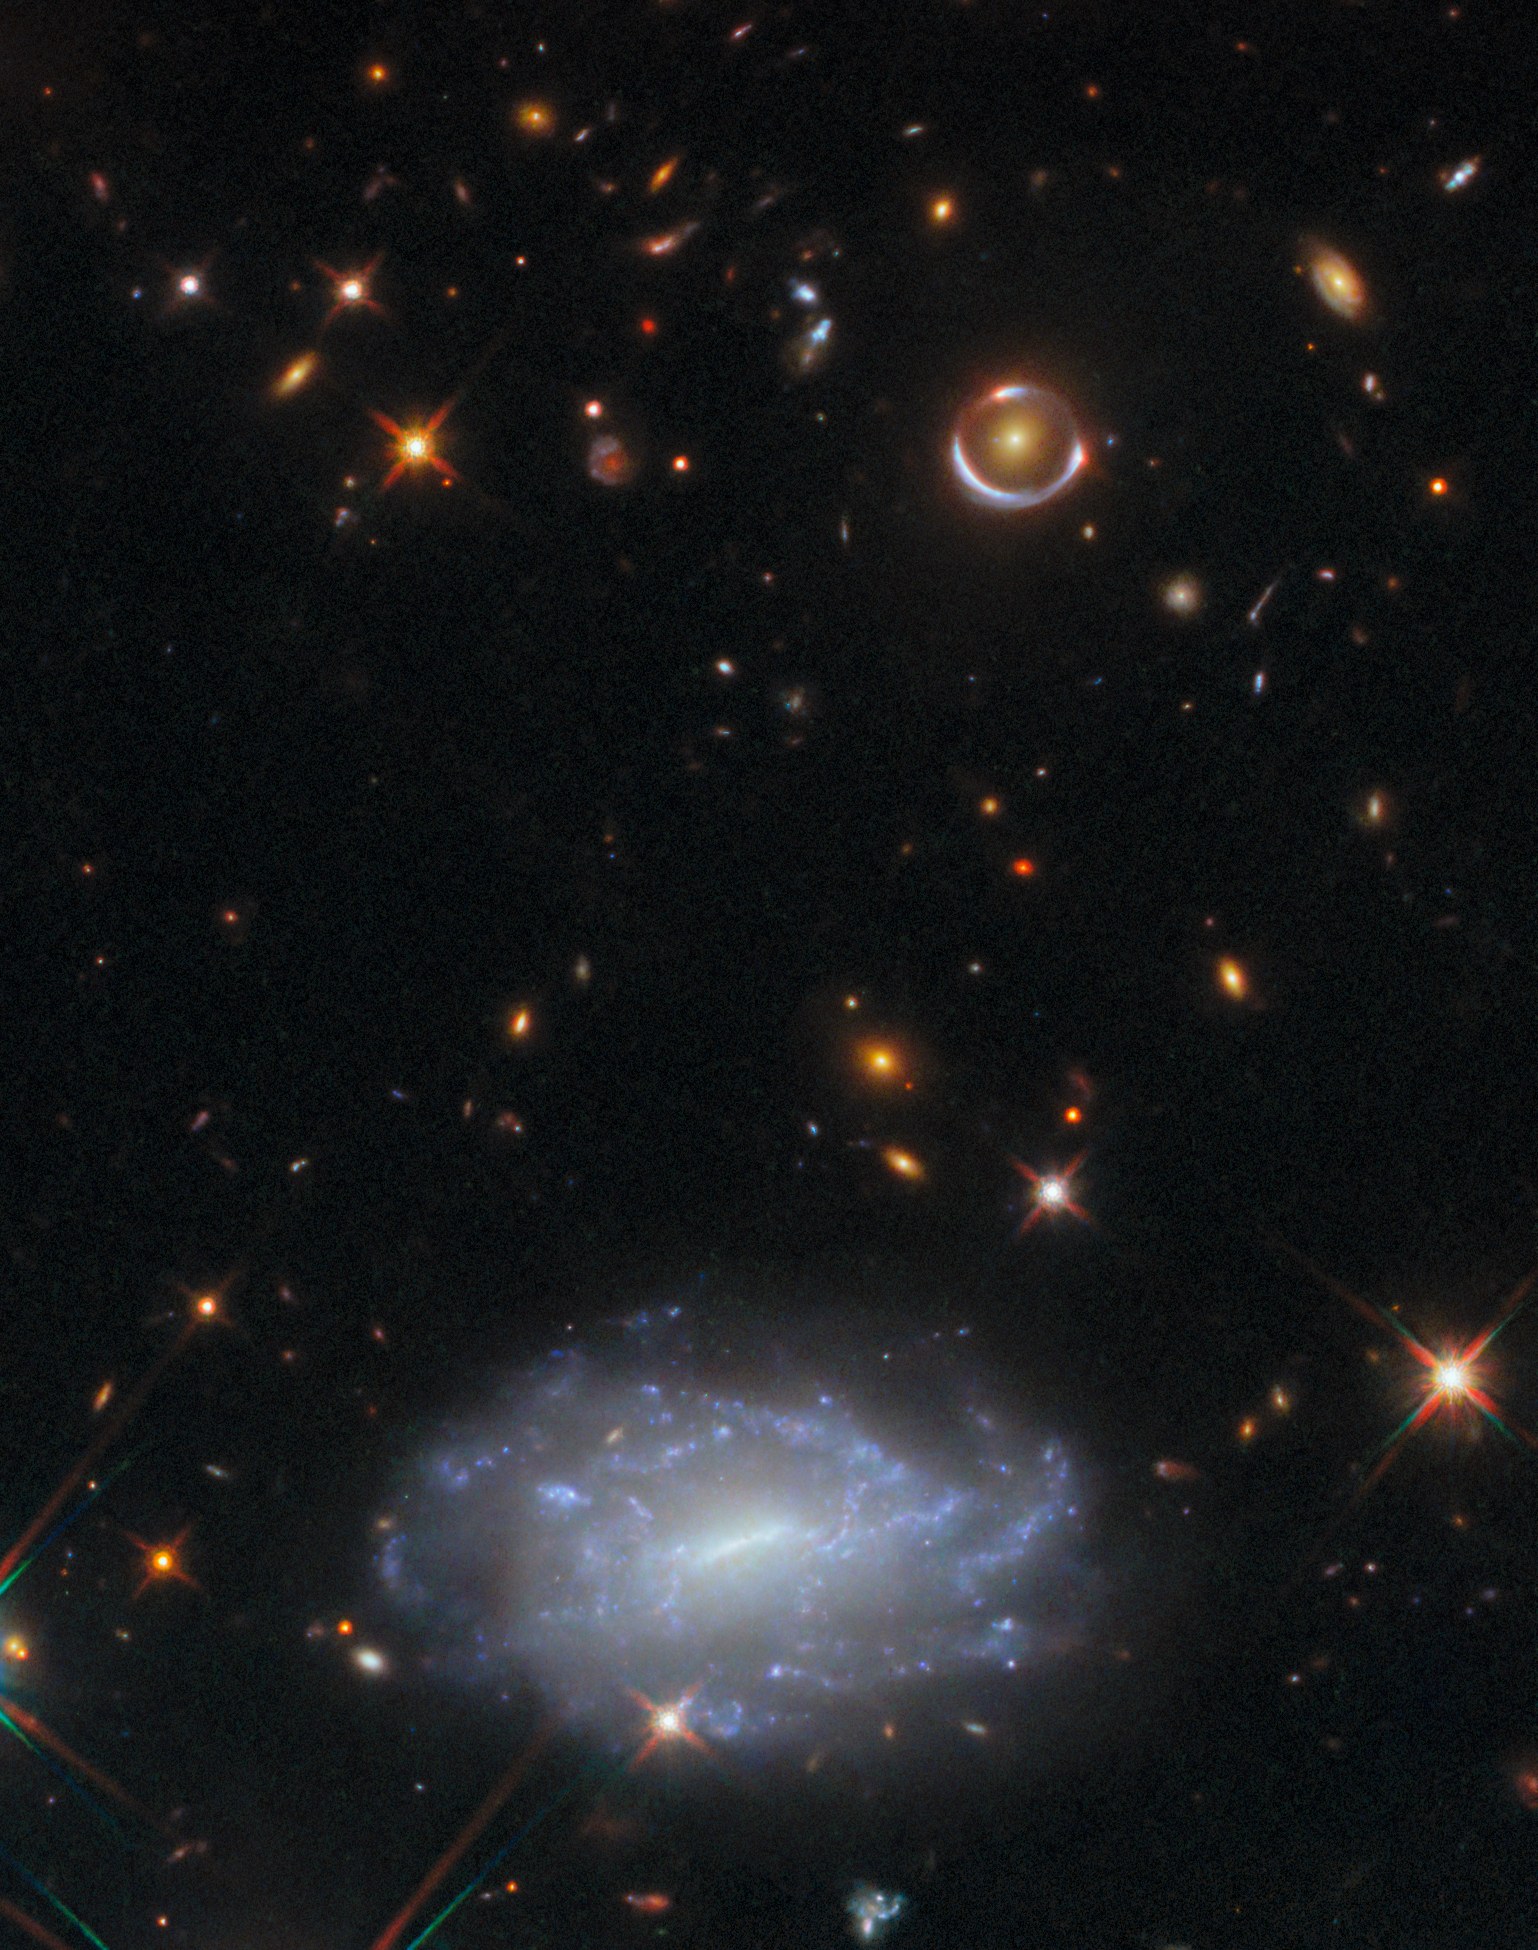

Ringing in the new year

This week’s NASA/ESA Hubble Space Telescope Picture of the Week shows a tiny patch of sky in the constellation Hydra. The stars and galaxies depicted here span a mind-bending range of distances. Nearest to us in this image are stars within our own Milky Way galaxy, which are marked by diffraction spikes. The bright star that sits just at the edge of the prominent bluish galaxy is only 3230 light-years away, as measured by ESA's Gaia space observatory.

Behind this star is a galaxy named LEDA 803211. At 622 million light-years distant, this galaxy is close enough that its bright galactic nucleus is clearly visible, as are numerous star clusters scattered around its patchy disc. Many of the more distant galaxies in this frame appear star-like, with no discernible structure, but without the diffraction spikes of a star in our galaxy.

Of all the galaxies in this frame, one pair stands out in particular: a smooth golden galaxy encircled by a nearly complete ring in the upper-right corner of the image. This curious configuration is the result of gravitational lensing, in which the light from a distant object is warped and magnified by the gravity of a massive foreground object, like a galaxy or a cluster of galaxies. Einstein predicted the curving of spacetime by matter in his general theory of relativity, and galaxies seemingly stretched into rings like the one in this image are called Einstein rings.

The lensed galaxy, whose image we see as the ring, lies incredibly far away from Earth: we are seeing it as it was when the Universe was just 2.5 billion years old. The galaxy acting as the gravitational lens itself is likely much closer. A nearly perfect alignment of the two galaxies is necessary to give us this rare kind of glimpse into galactic life in the early days of the Universe.

Credit: ESA/Hubble & NASA, D. Erb